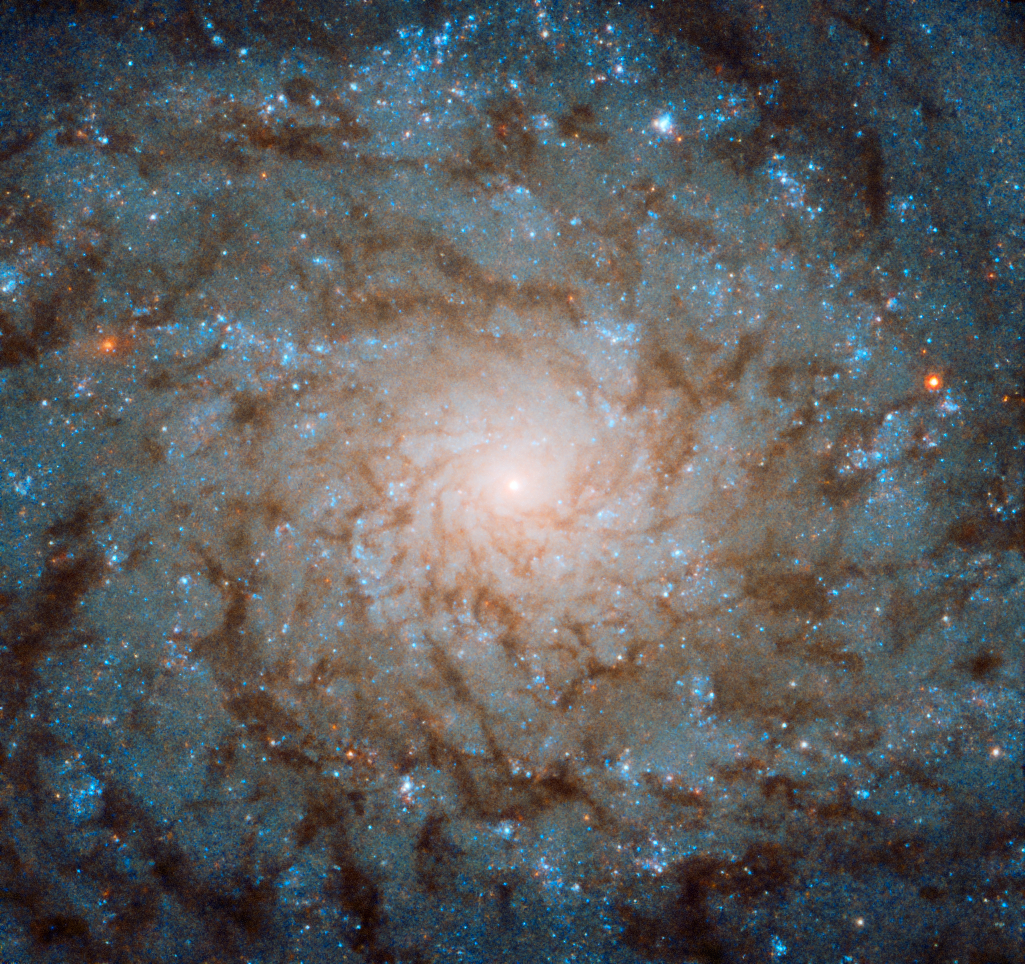

A Smudged Fingerprint

TheNASA/ESA Hubble Space Telescope is no stranger to spiral galaxies. The telescope has brought us some of the most beautiful images ever taken of our spiral neighbours — and this Picture of the Week, which features a galaxy known as NGC 4689, is no exception.

However, seen almost face on, NGC 4689 appears less like a majestic spiral and more like a smudged fingerprint on the sky. No matter how good the image quality, there is little contrast between the spiralling arms of stars, gas, and dust, and the less dense areas in between. This is because NGC 4689 is something known as an “anaemic galaxy”, a galaxy that contains only quite small quantities of the raw materials needed to produce stars. This means that star formation is quelled in NGC 4689, and the pinwheeling, bustling arms are less bright than those belonging to other Hubble muses.

Despite this subtlety when compared to its brash, spotlight-stealing relatives, NGC 4689 retains an otherworldly charm, its delicately glowing material standing out subtly from the surrounding darkness of space.

Credit: ESA/Hubble & NASA, P. Erwin